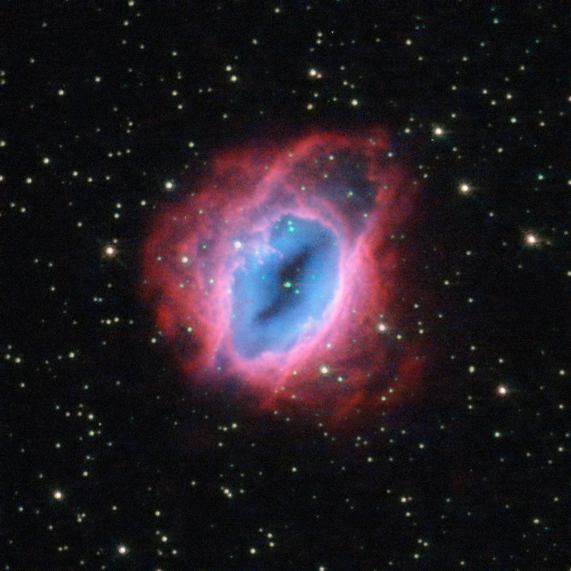

Glowing, fiery shells of gas

It may look like something from The Lord of the Rings, but this fiery swirl is actually a planetary nebula known as ESO 456-67. Set against a backdrop of bright stars, the rust-coloured object lies in the constellation of Sagittarius (The Archer), in the southern sky.

Despite the name, these ethereal objects have nothing at all to do with planets; this misnomer came about over a century ago, when the first astronomers to observe them only had small, poor-quality telescopes. Through these, the nebulae looked small, compact, and planet-like — and so were labelled as such.

When a star like the Sun approaches the end of its life, it flings material out into space. Planetary nebulae are the intricate, glowing shells of dust and gas pushed outwards from such a star. At their centres lie the remnants of the original stars themselves — small, dense white dwarf stars.

In this image of ESO 456-67, it is possible to see the various layers of material expelled by the central star. Each appears in a different hue — red, orange, yellow, and green-tinted bands of gas are visible, with clear patches of space at the heart of the nebula. It is not fully understood how planetary nebulae form such a wide variety of shapes and structures; some appear to be spherical, some elliptical, others shoot material in waves from their polar regions, some look like hourglasses or figures of eight, and others resemble large, messy stellar explosions — to name but a few.

A version of this image was entered into the Hubble's Hidden Treasures image processing competition by contestant Jean-Christophe Lambry

Credit: ESA/Hubble & NASA Acknowledgement: Jean-Christophe Lambry